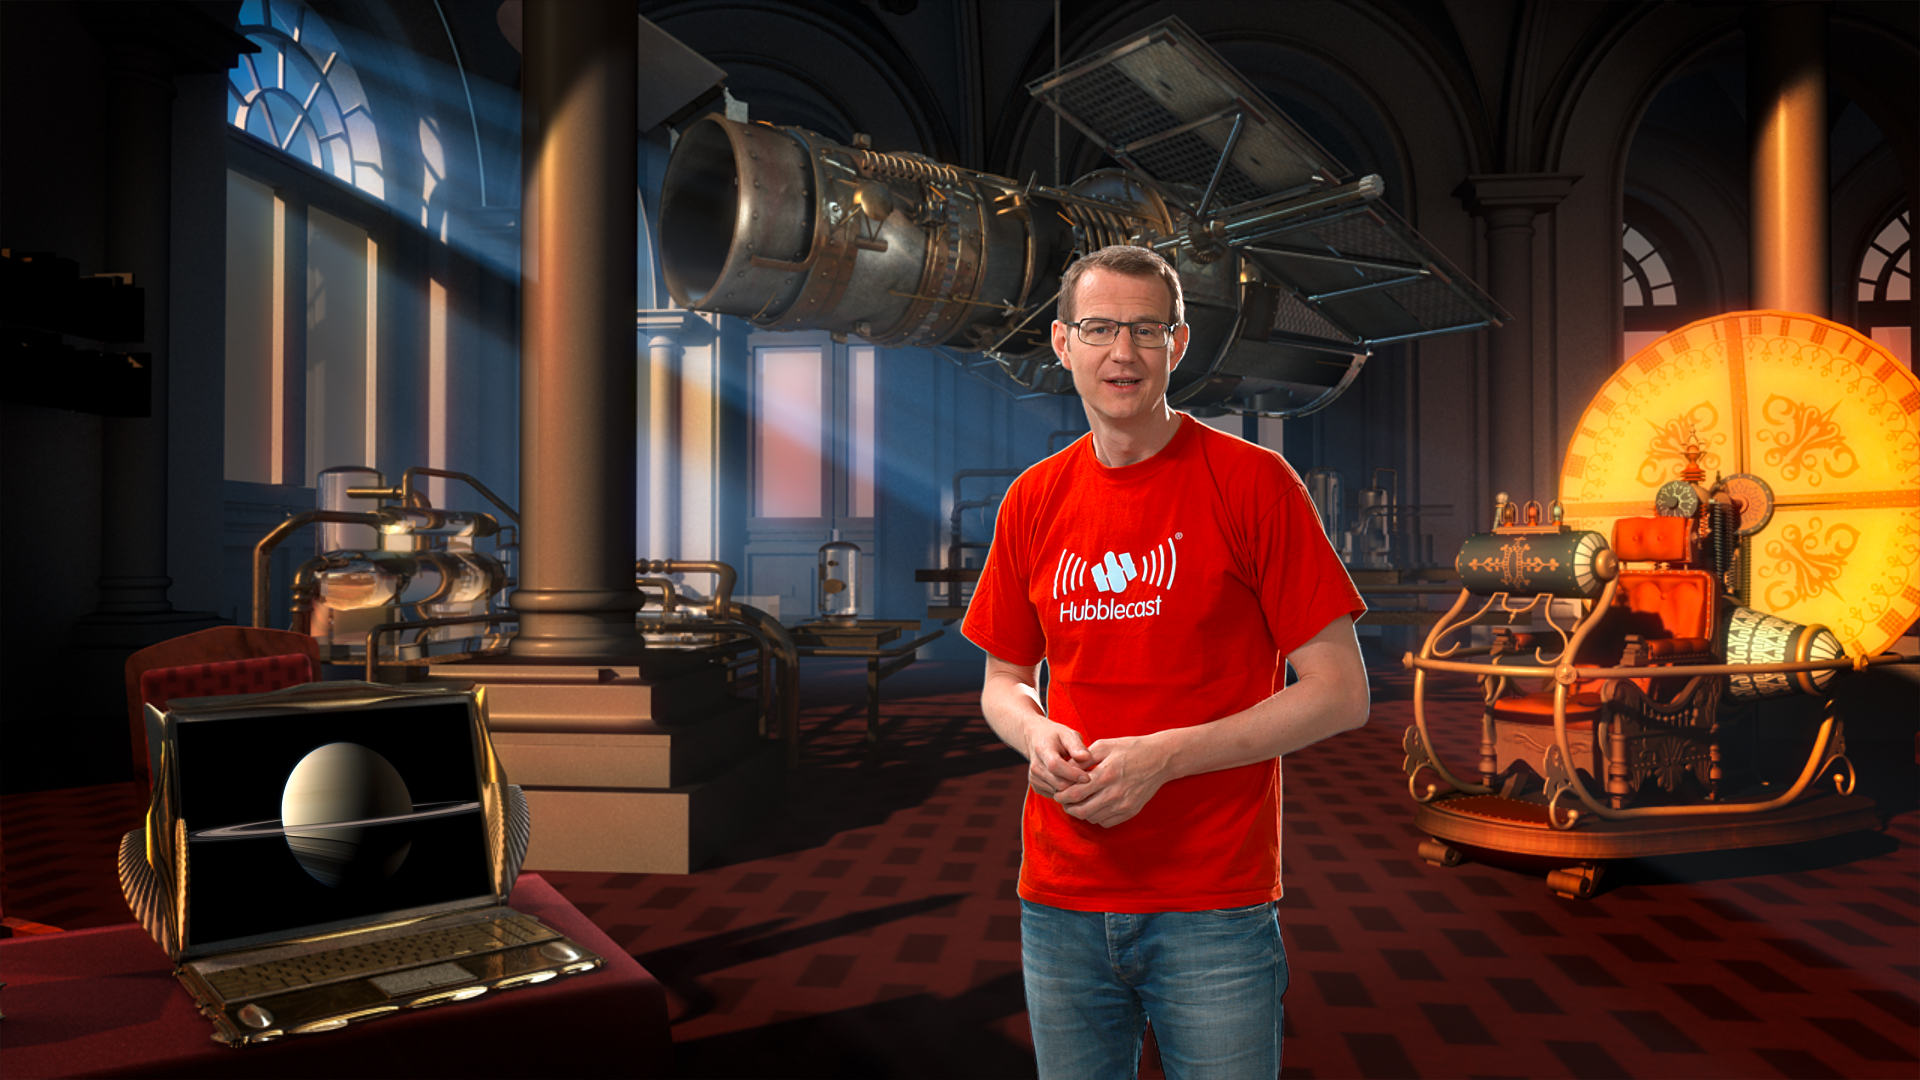

Screenshot of Hubblecast 68

Screenshot of Hubblecast 68: The Hubble time machine.

Credit: NASA & ESA